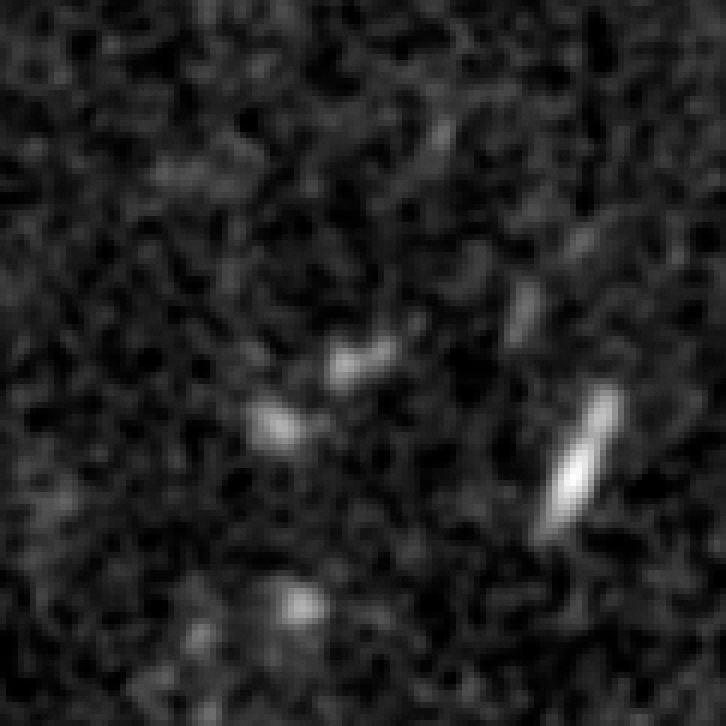

Arc in infrared light (Hubble)

The distant galaxy, dubbed A1689-zD1, appears as a greyish-white smudge in the close-up view taken with Hubble's NICMOS. The galaxy is brimming with star birth. Hubble and Spitzer worked together to show that it is one of the youngest and likely the most distant galaxies ever discovered. Astronomers estimate that the galaxy is 13 billion light-years away. Abell 1689 is 2.2 billion light-years away.

Credit: NASA; ESA; L. Bradley (Johns Hopkins University); R. Bouwens (University of California, Santa Cruz); H. Ford (Johns Hopkins University); and G. Illingworth (University of California, Santa Cruz)